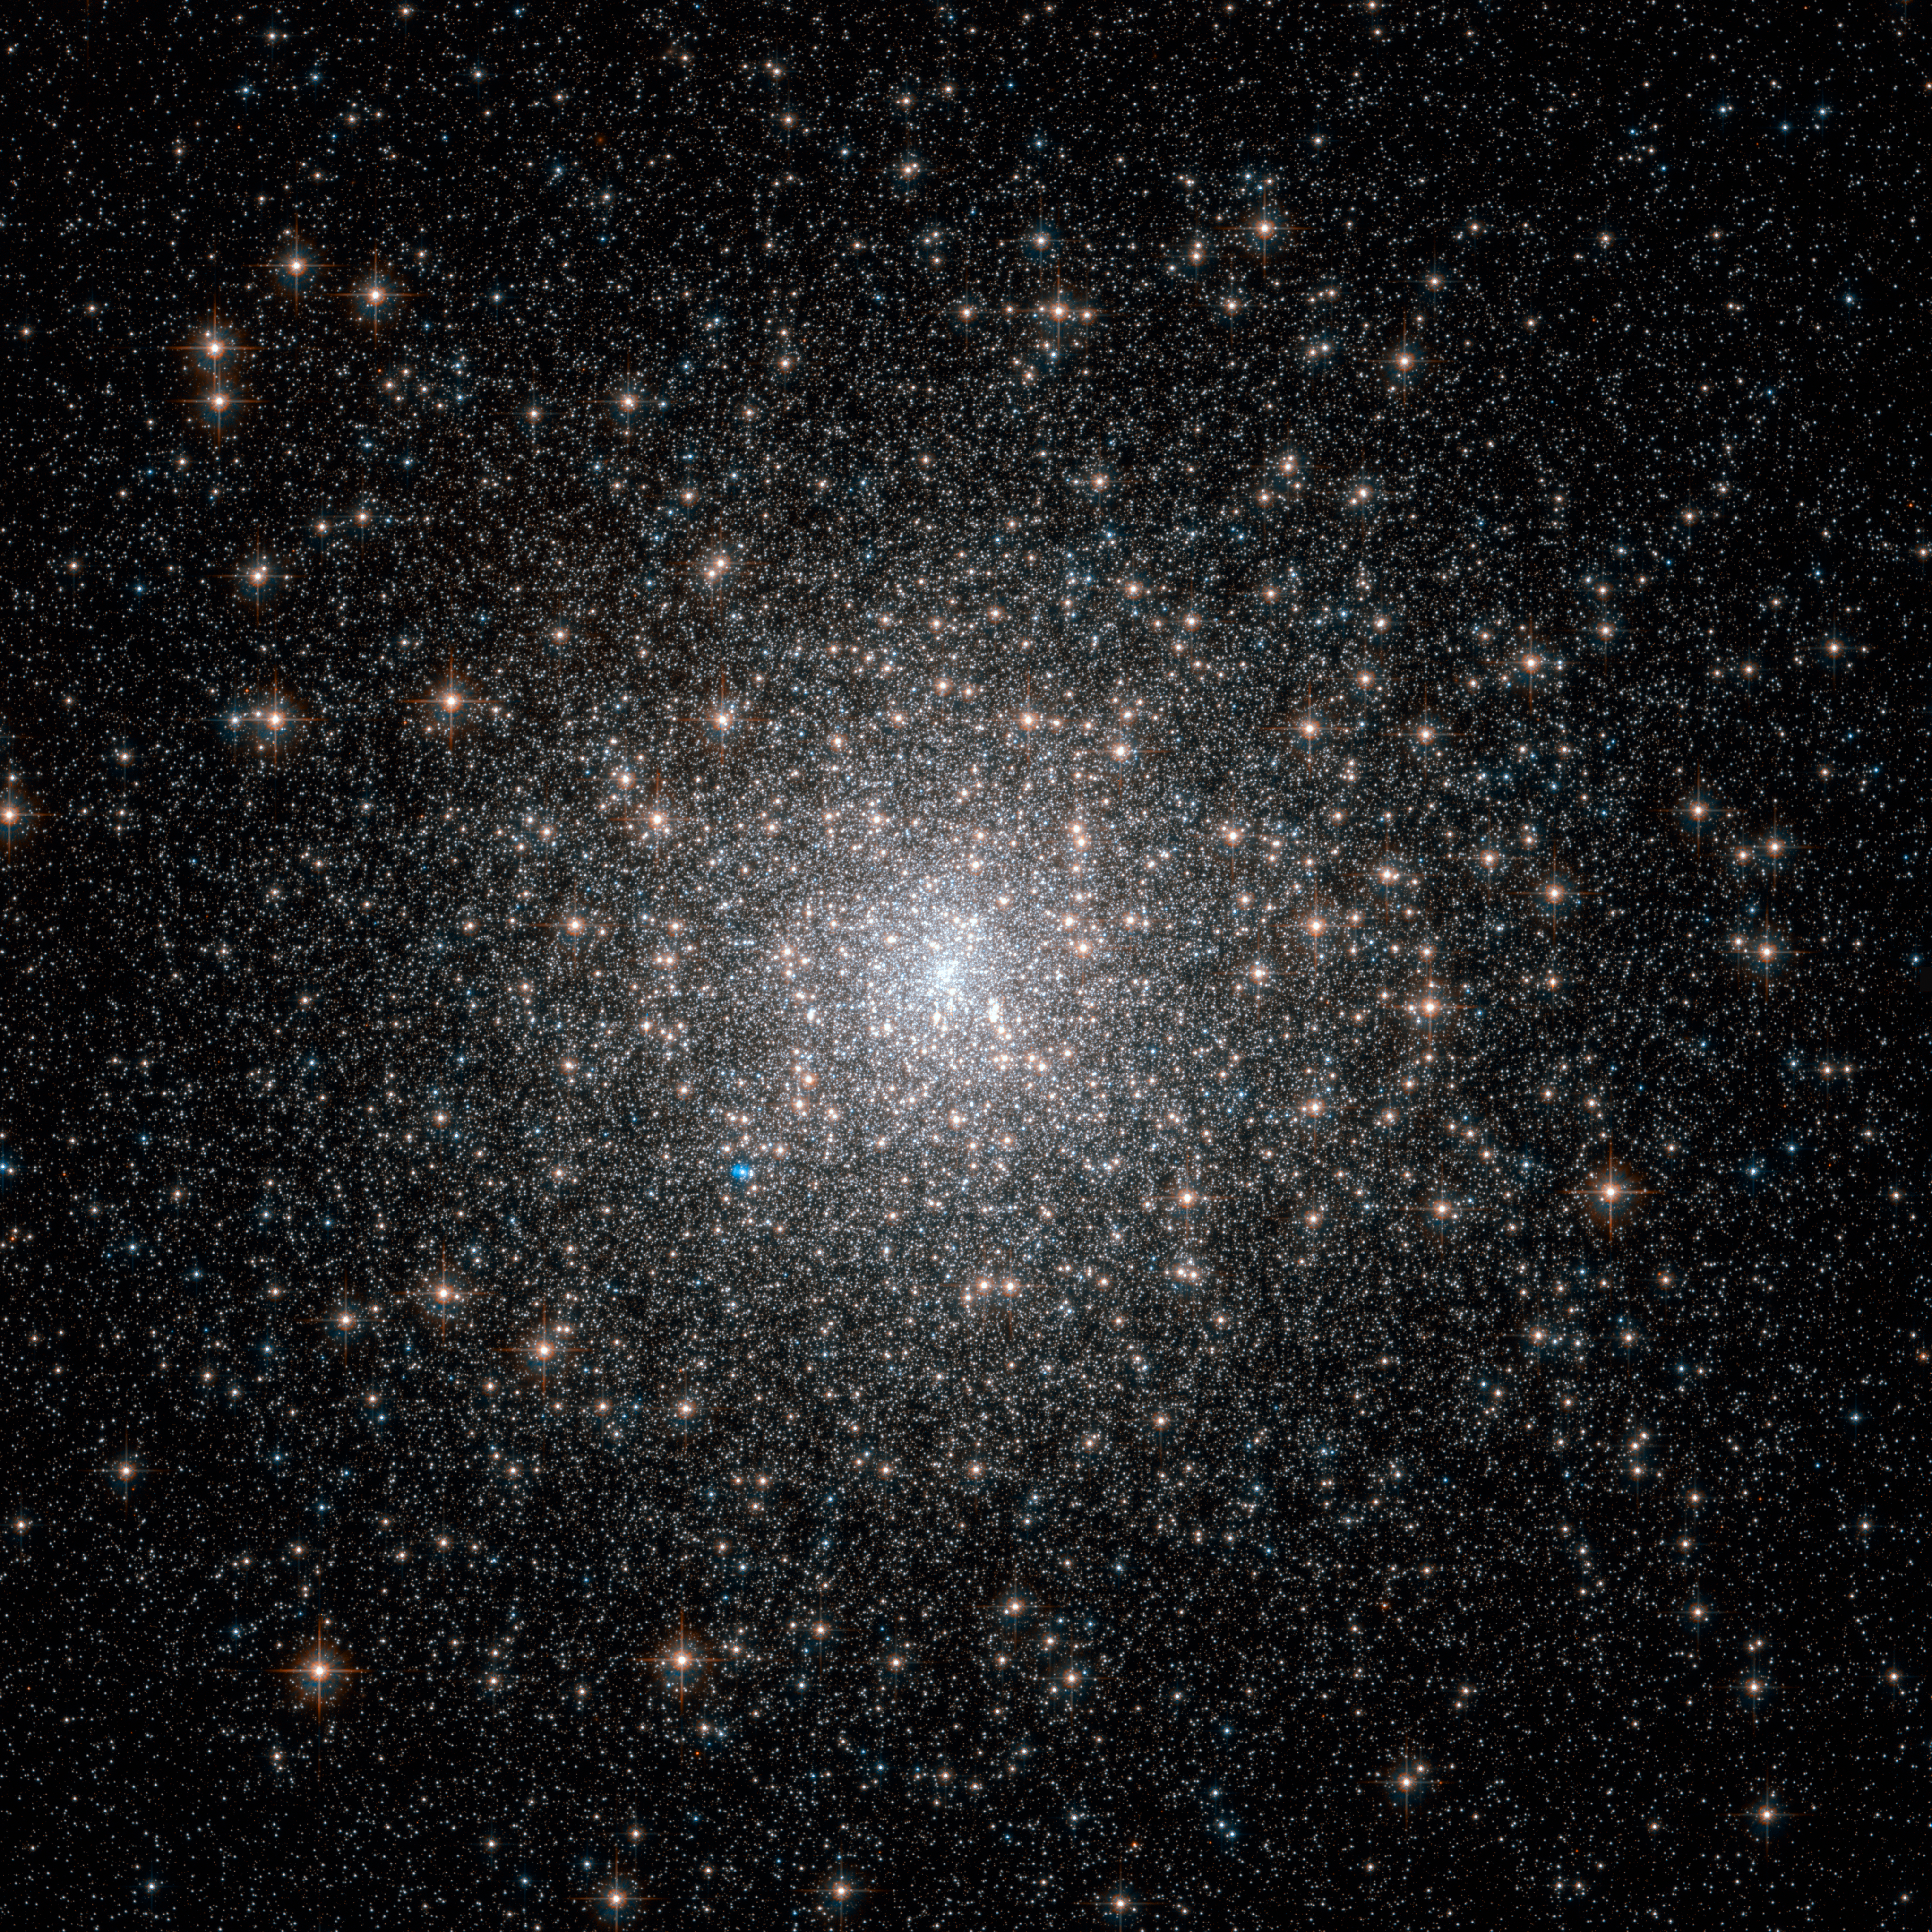

Old stars with a youthful glow

The dazzling stars in Messier 15 look fresh and new in this image from the NASA/Hubble Space Telescope, but they are actually all roughly 13 billion years old, making them some of the most ancient objects in the Universe. Unlike another recent Hubble Picture of the Week, which featured the unusually sparse cluster Palomar 1, Messier 15 is rich and bright despite its age.

Messier 15 is a globular cluster — a spherical conglomeration of old stars that formed together from the same cloud of gas, found in the outer reaches of the Milky Way in a region known as the halo and orbiting the Galactic Centre. This globular lies about 35 000 light-years from the Earth, in the constellation of Pegasus (The Flying Horse).

Messier 15 is one of the densest globulars known, with the vast majority of the cluster’s mass concentrated in the core. Astronomers think that particularly dense globulars, like this one, underwent a process called core collapse, in which gravitational interactions between stars led to many members of the cluster migrating towards the centre.

Messier 15 is also the first globular cluster known to harbour a planetary nebula, and it is still one of only four globulars known to do so. The planetary nebula, called Pease 1, can be seen in this image as a small blue blob to the lower left of the globular’s core.

This picture was put together from images taken with the Wide Field Channel of Hubble's Advanced Camera for Surveys. Images through yellow/orange (F606W, coloured blue) and near-infrared (F814W, coloured red) filters were combined. The total exposure times were 535 s and 615 s respectively and the field of view is 3.4 arcminutes across.

Credit: ESA/Hubble & NASA